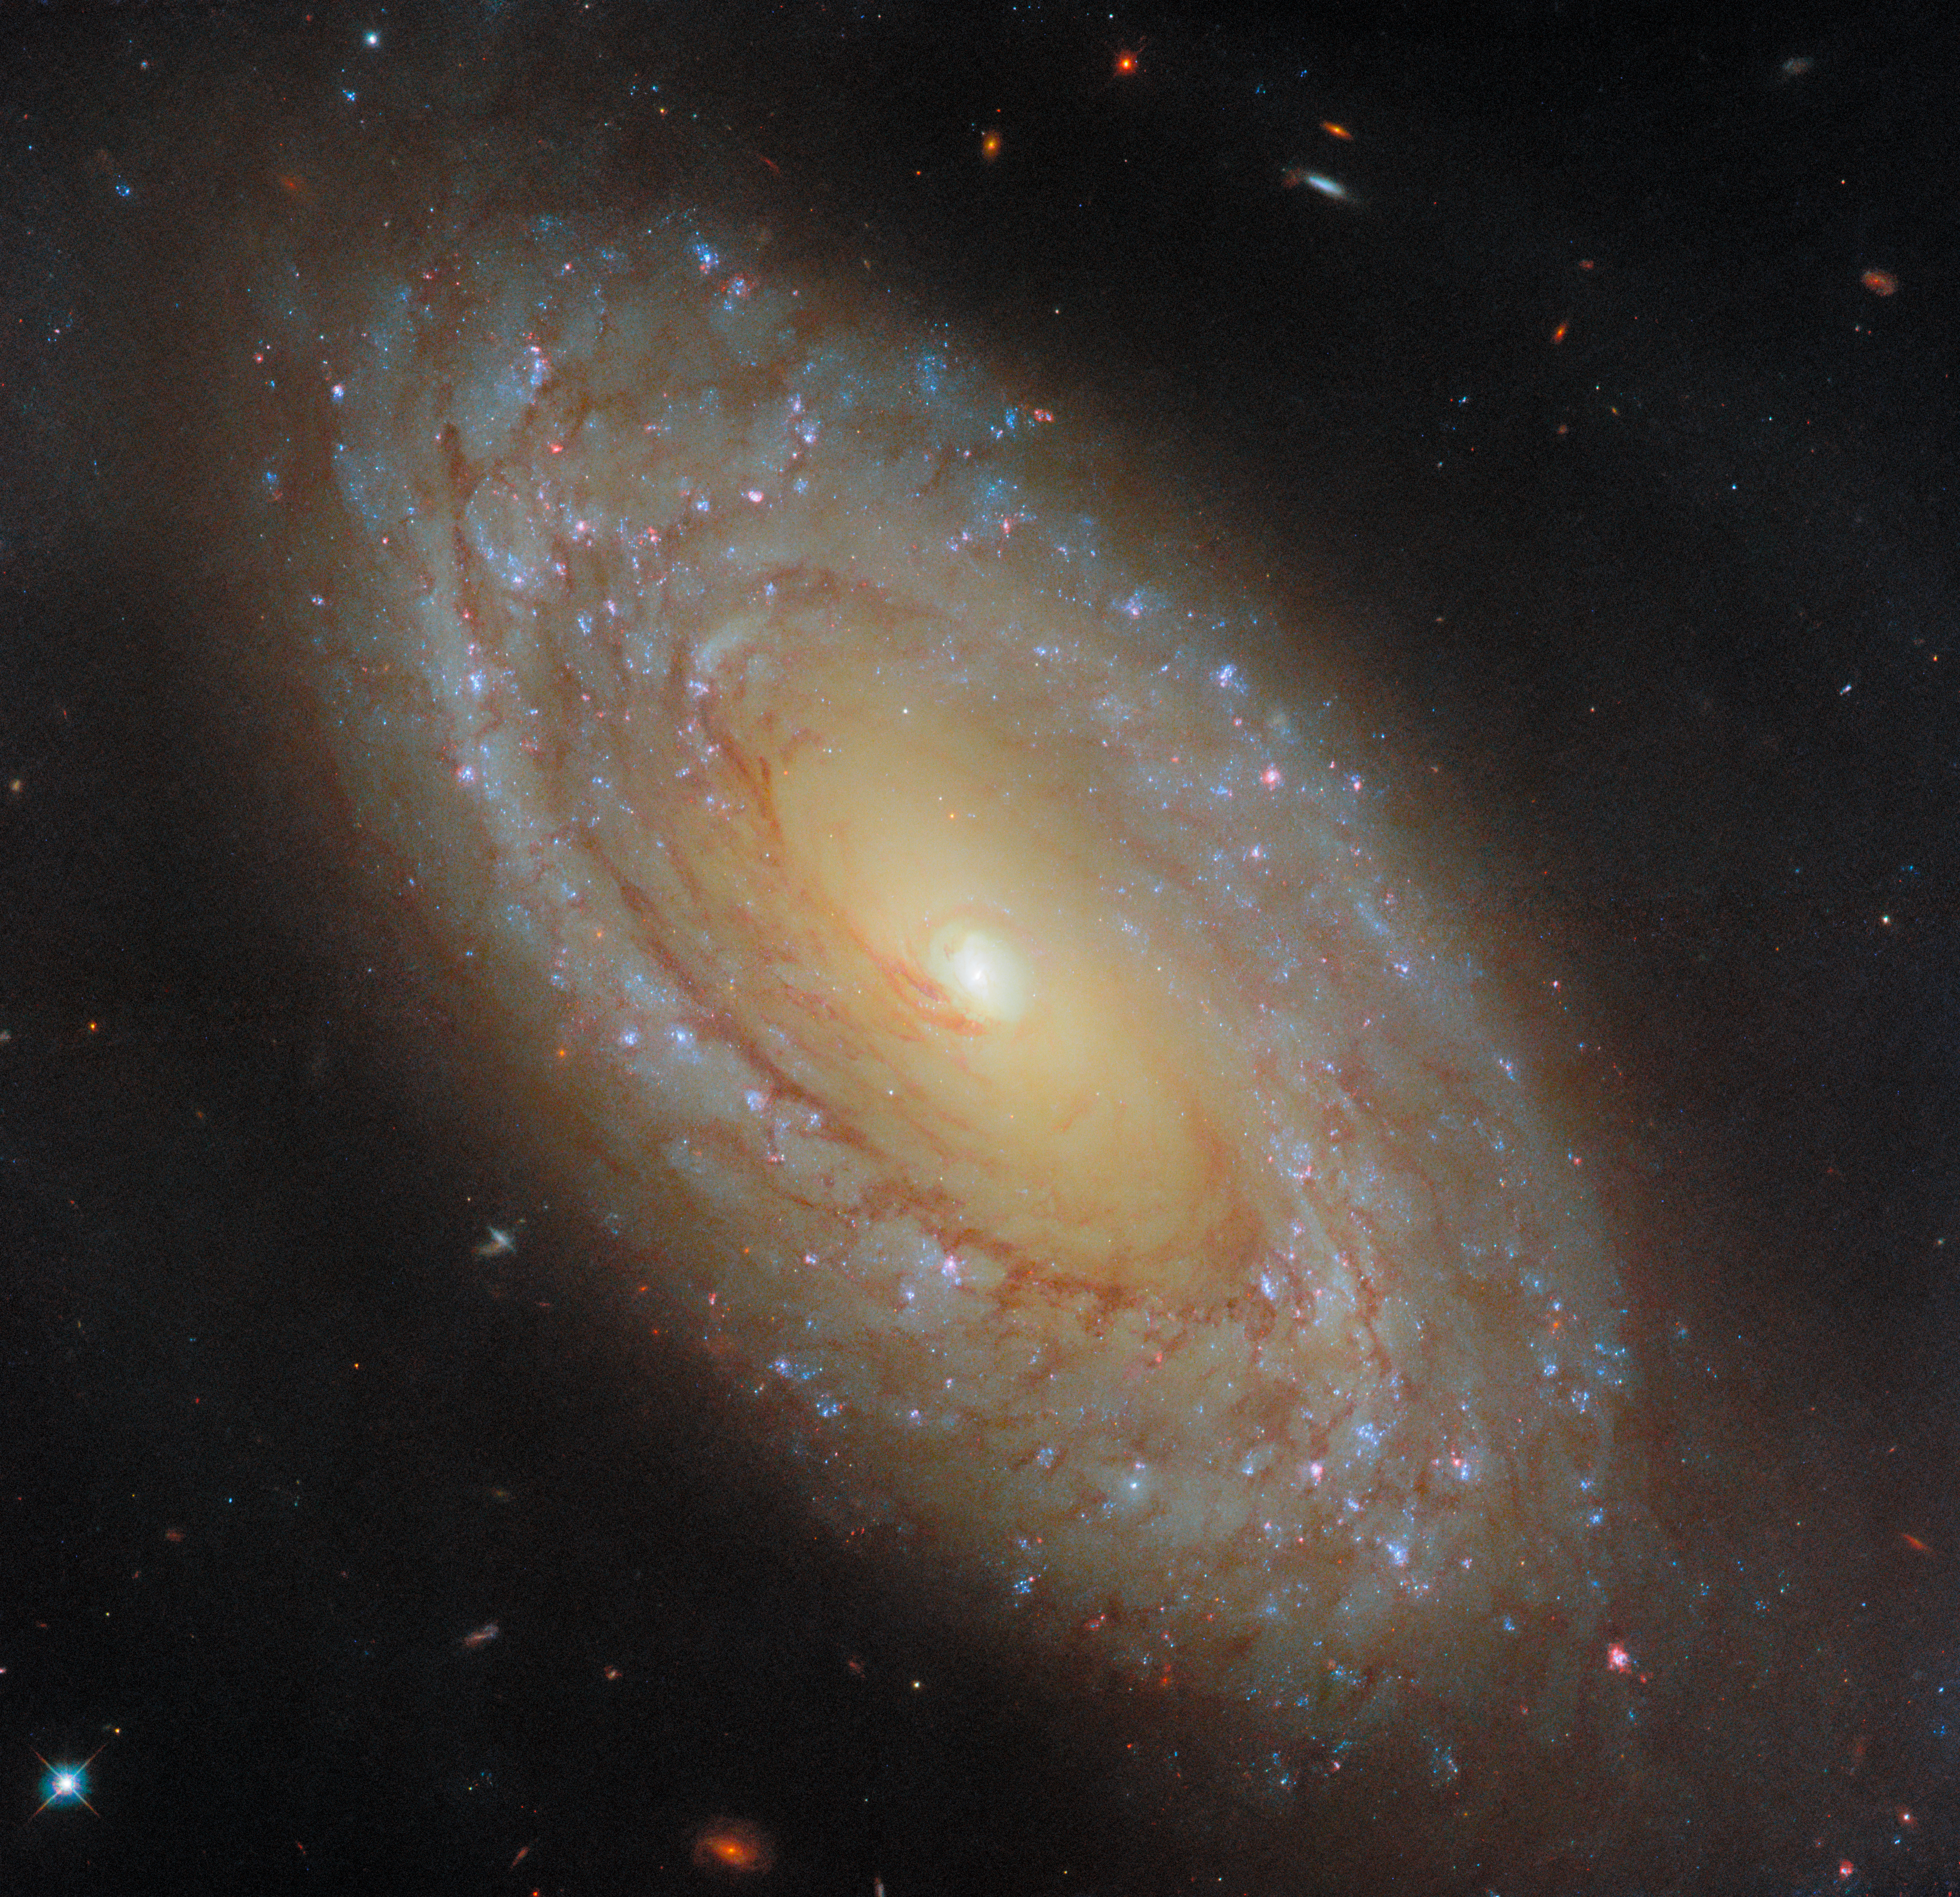

A galaxy that gives great feedback

This NASA/ESA Hubble Space Telescope Picture of the Week features the picturesque spiral galaxy NGC 4941, which lies about 67 million light-years from Earth in the constellation Virgo (The Maiden). Because this galaxy is nearby, cosmically speaking, Hubble’s keen instruments are able to pick out exquisite details such as individual star clusters and filamentary clouds of gas and dust.

The data used to construct this image were collected as part of an observing programme that investigates the star formation and stellar feedback cycle in nearby galaxies. As stars form in dense, cold clumps of gas, they begin to influence their surroundings. Stars heat and stir up the gas clouds in which they are born through winds, starlight, and — eventually, for massive stars — by exploding as supernovae. These processes are collectively called stellar feedback, and they impact the rate at which a galaxy can form new stars.

As it turns out, stars aren’t the only entities providing feedback in NGC 4941. At the heart of this galaxy lies an active galactic nucleus: a supermassive black hole feasting on gas. As the black hole amasses gas from its surroundings, the gas swirls into a superheated disc that glows brightly at wavelengths across the electromagnetic spectrum. Similar to stars — but on a much, much larger scale — active galactic nuclei shape their surroundings through winds, radiation, and powerful jets, altering not only star formation but also the evolution of the galaxy as a whole.

Credit: ESA/Hubble & NASA, D. Thilker